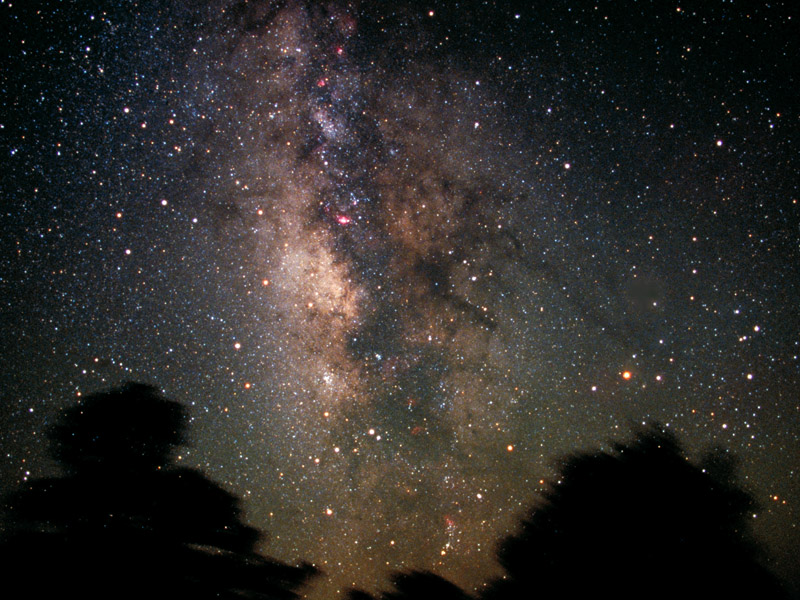

The Milky Way and Sagittarius Constellation

Rising into the night sky is the glittering plane of our galaxy. This picture shows the center of the Milky Way and on the left side Sagittarius (the Archer), one of the constellations of the zodiac.

As seen from the northern hemisphere, the constellation's brighter stars form an easily recognizable asterism known as 'the Teapot'. In this picture one of the two brightes stars of the Teapot is hidden behind the tres on the left.

The constellation as a whole has the appearance of a Centaur archer drawing its bow, with the fainter stars creating the outline of his horse like body.. The arrowhead is pointing at the reddish star Antares, which is located on the other side of the Milky Way plane.

Credit: Terrence Dickinson